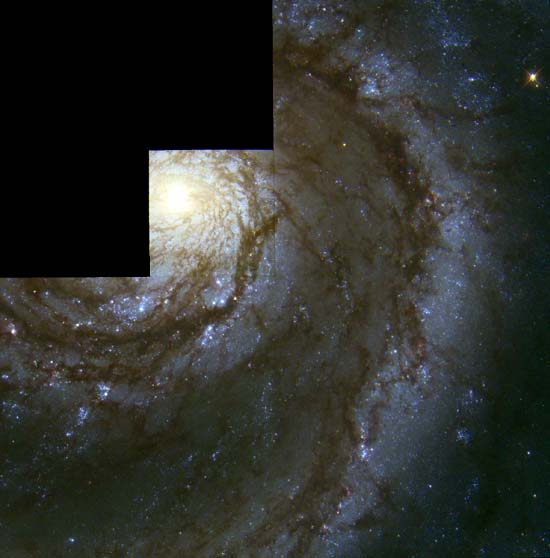

The Whirlpool Galaxy

The NASA/ESA Hubble Space Telescope has snapped a view of several star generations in the central region of the Whirlpool Galaxy (M51), a spiral region 23 million light-years from Earth in the constellation Canes Venatici (the Hunting Dogs).

Credit: Nino Panagia ( Space Telescope Science Institute and European Space Agency) and NASA